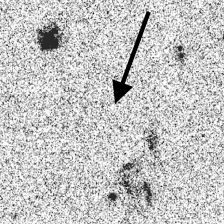

Distant Galaxy in the Hubble Deep Field

Series of four panels that illustrate the distant-galaxy identification technique.

The F814W filter has been used to obtain this image.

Credit: Ken Lanzetta and Amos Yahil (State University of New York at Stony Brook), and NASA/ESA